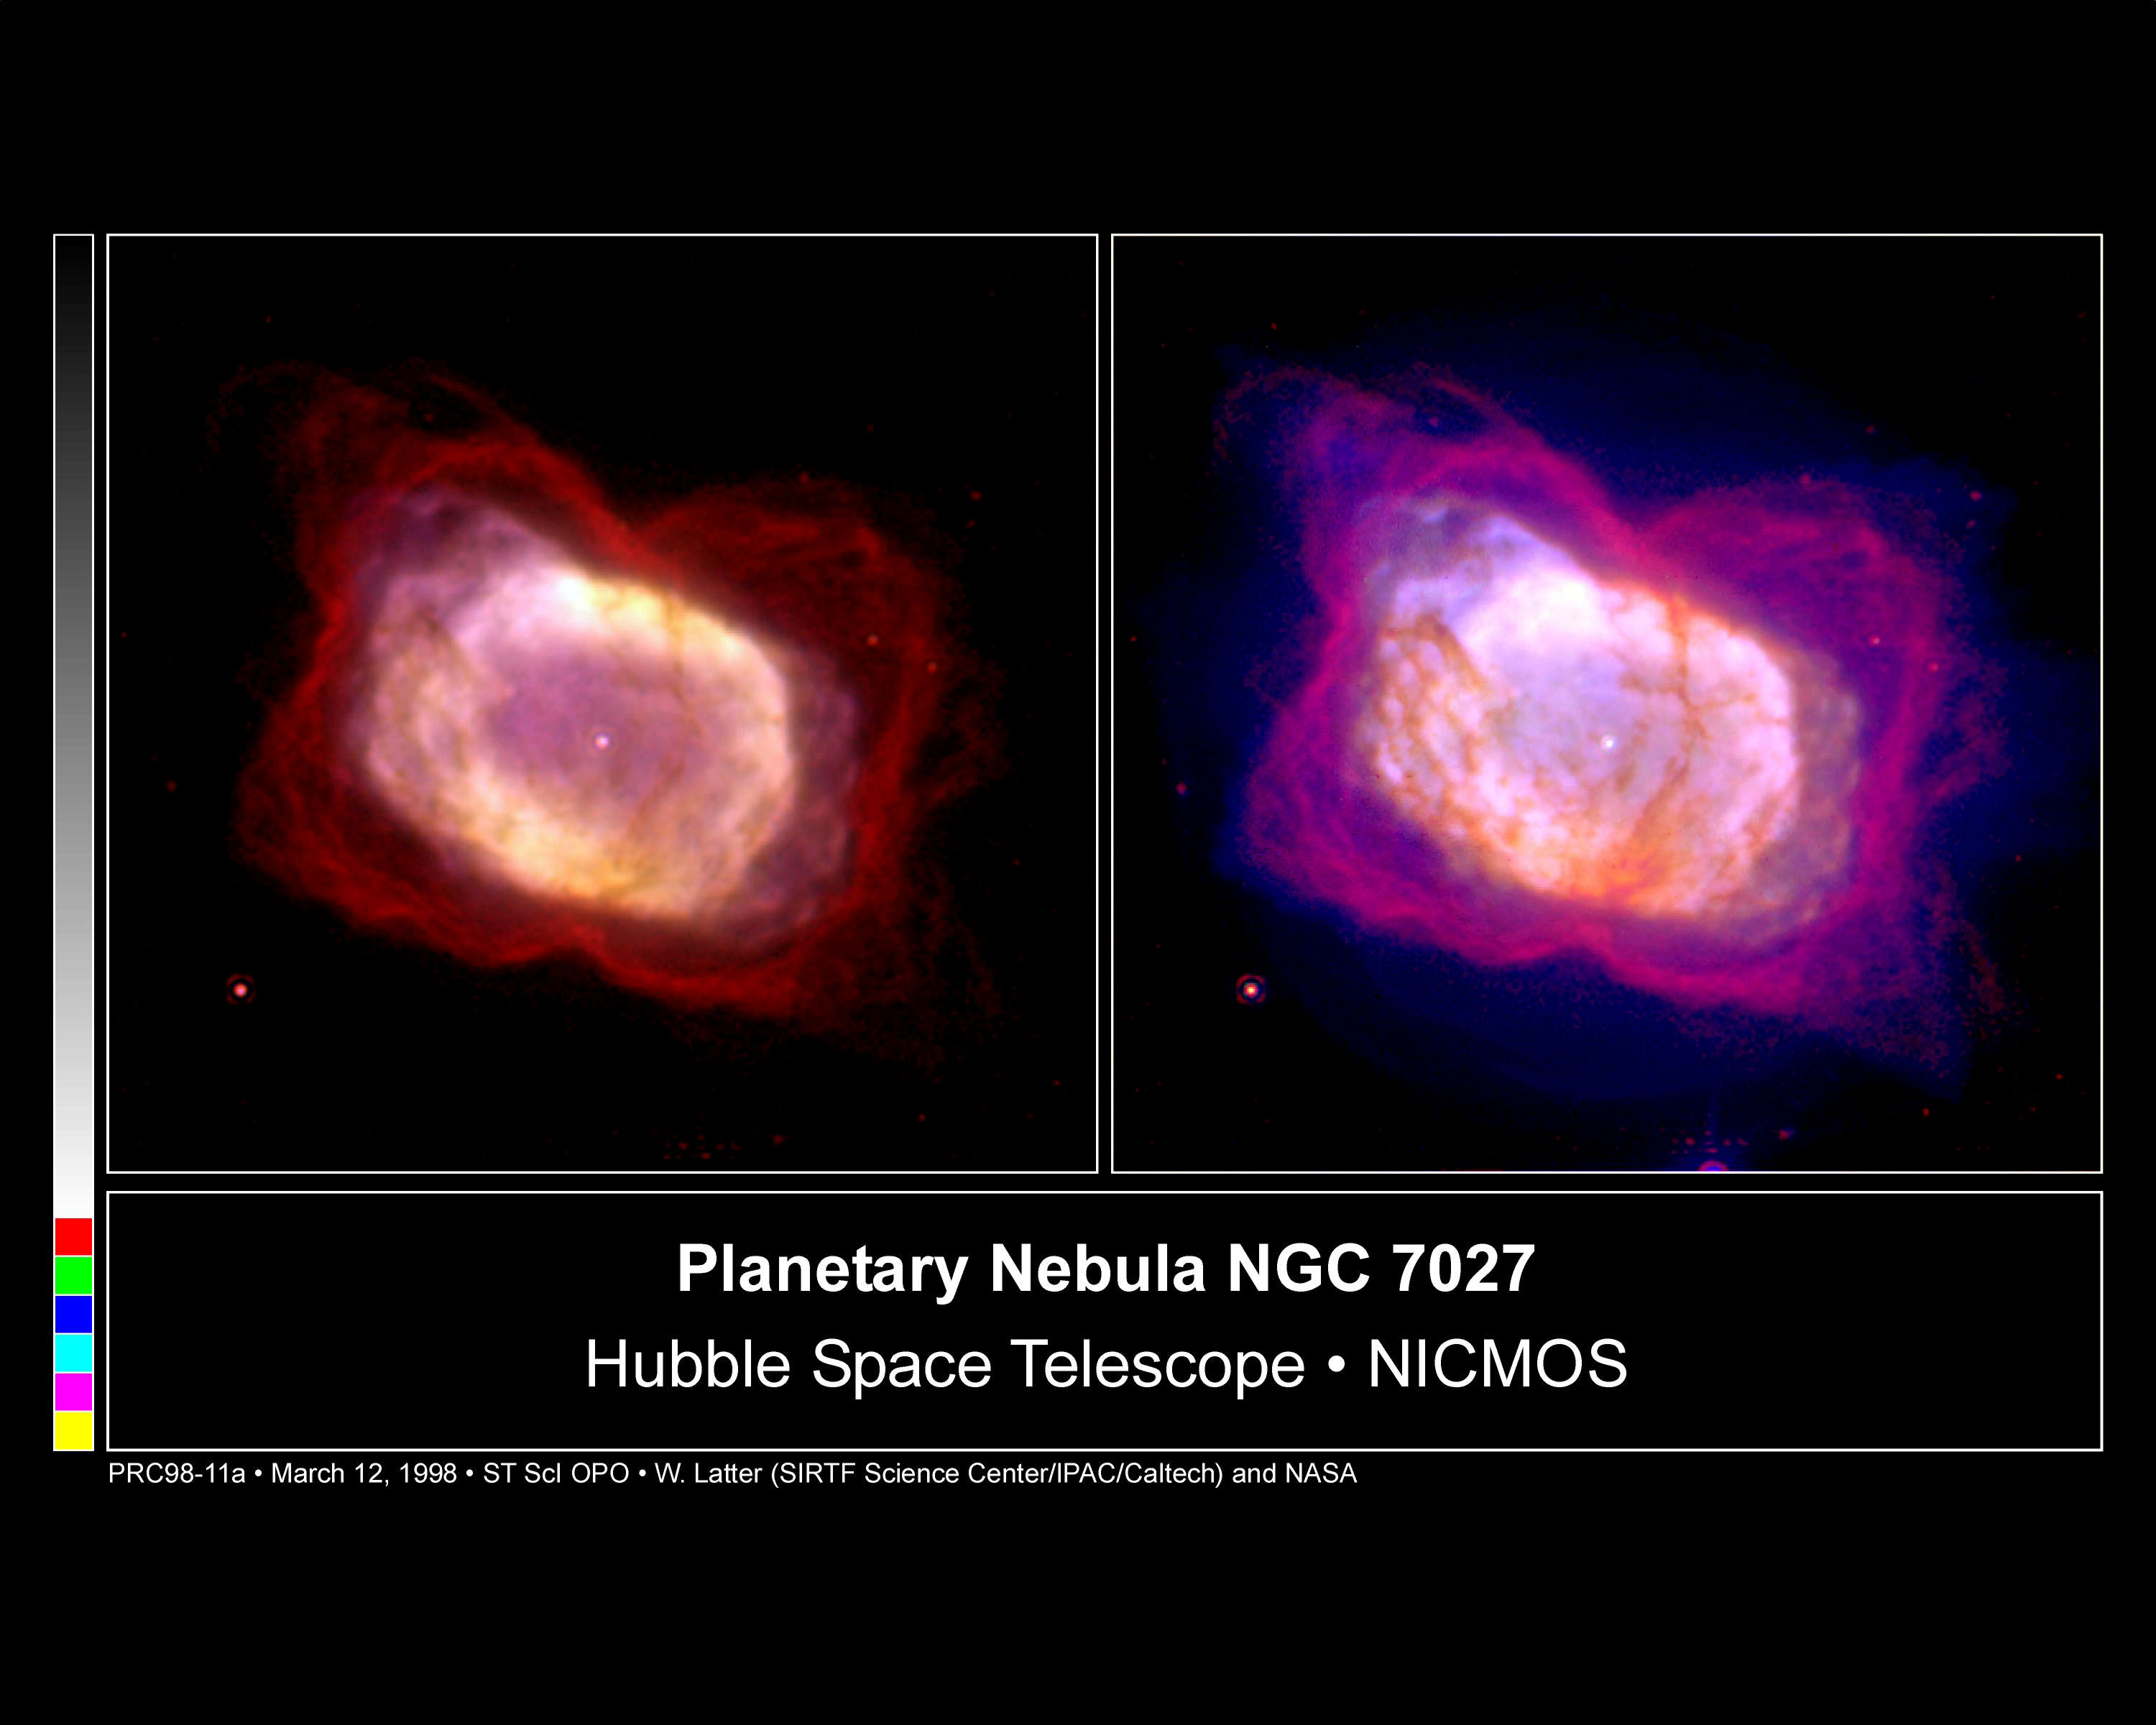

Planetary Nebula NGC 7027

The Hubble Space Telescope's Near Infrared Camera and Multi-Object Spectrometer (NICMOS) has captured a glimpse of a brief stage in the burnout of NGC 7027, a medium-mass star like our sun. The infrared image (on the left) shows a young planetary nebula in a state of rapid transition. This image alone reveals important new information. When astronomers combine this photo with an earlier image taken in visible light, they have a more complete picture of the final stages of star life.

Credit: William B. Latter (SIRTF Science Center/Caltech) and NASA/ESA